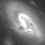

Galaxies: snapshots in time

Single images from the Galaxies: Snapshots in Time collage.

Credit: NASA & ESA